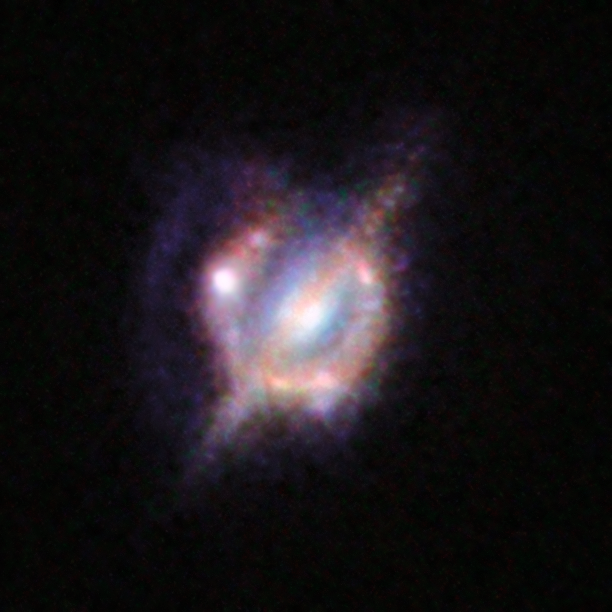

Merging galaxies in the distant Universe through a gravitational magnifying glass

The NASA/ESA Hubble Space Telescope and many other telescopes on the ground and in space have been used to obtain the best view yet of a collision that took place between two galaxies when the Universe was only half its current age. The astronomers enlisted the help of a galaxy-sized magnifying glass to reveal otherwise invisible detail.

These new studies of the galaxy H-ATLAS J142935.3-002836 have shown that this complex and distant object looks surprisingly like the well-known local galaxy collision, the Antennae Galaxies.

In this picture, which combines views from Hubble and the Keck-II telescope on Hawaii (using adaptive optics), you can see a foreground galaxy that is acting as the gravitational lens. The galaxy resembles how our home galaxy, the Milky Way, would appear if seen edge-on. But around this galaxy there is an almost complete ring — the smeared out image of a star-forming galaxy merger far beyond.

Credit: NASA/ESA/ESO/W. M. Keck Observatory